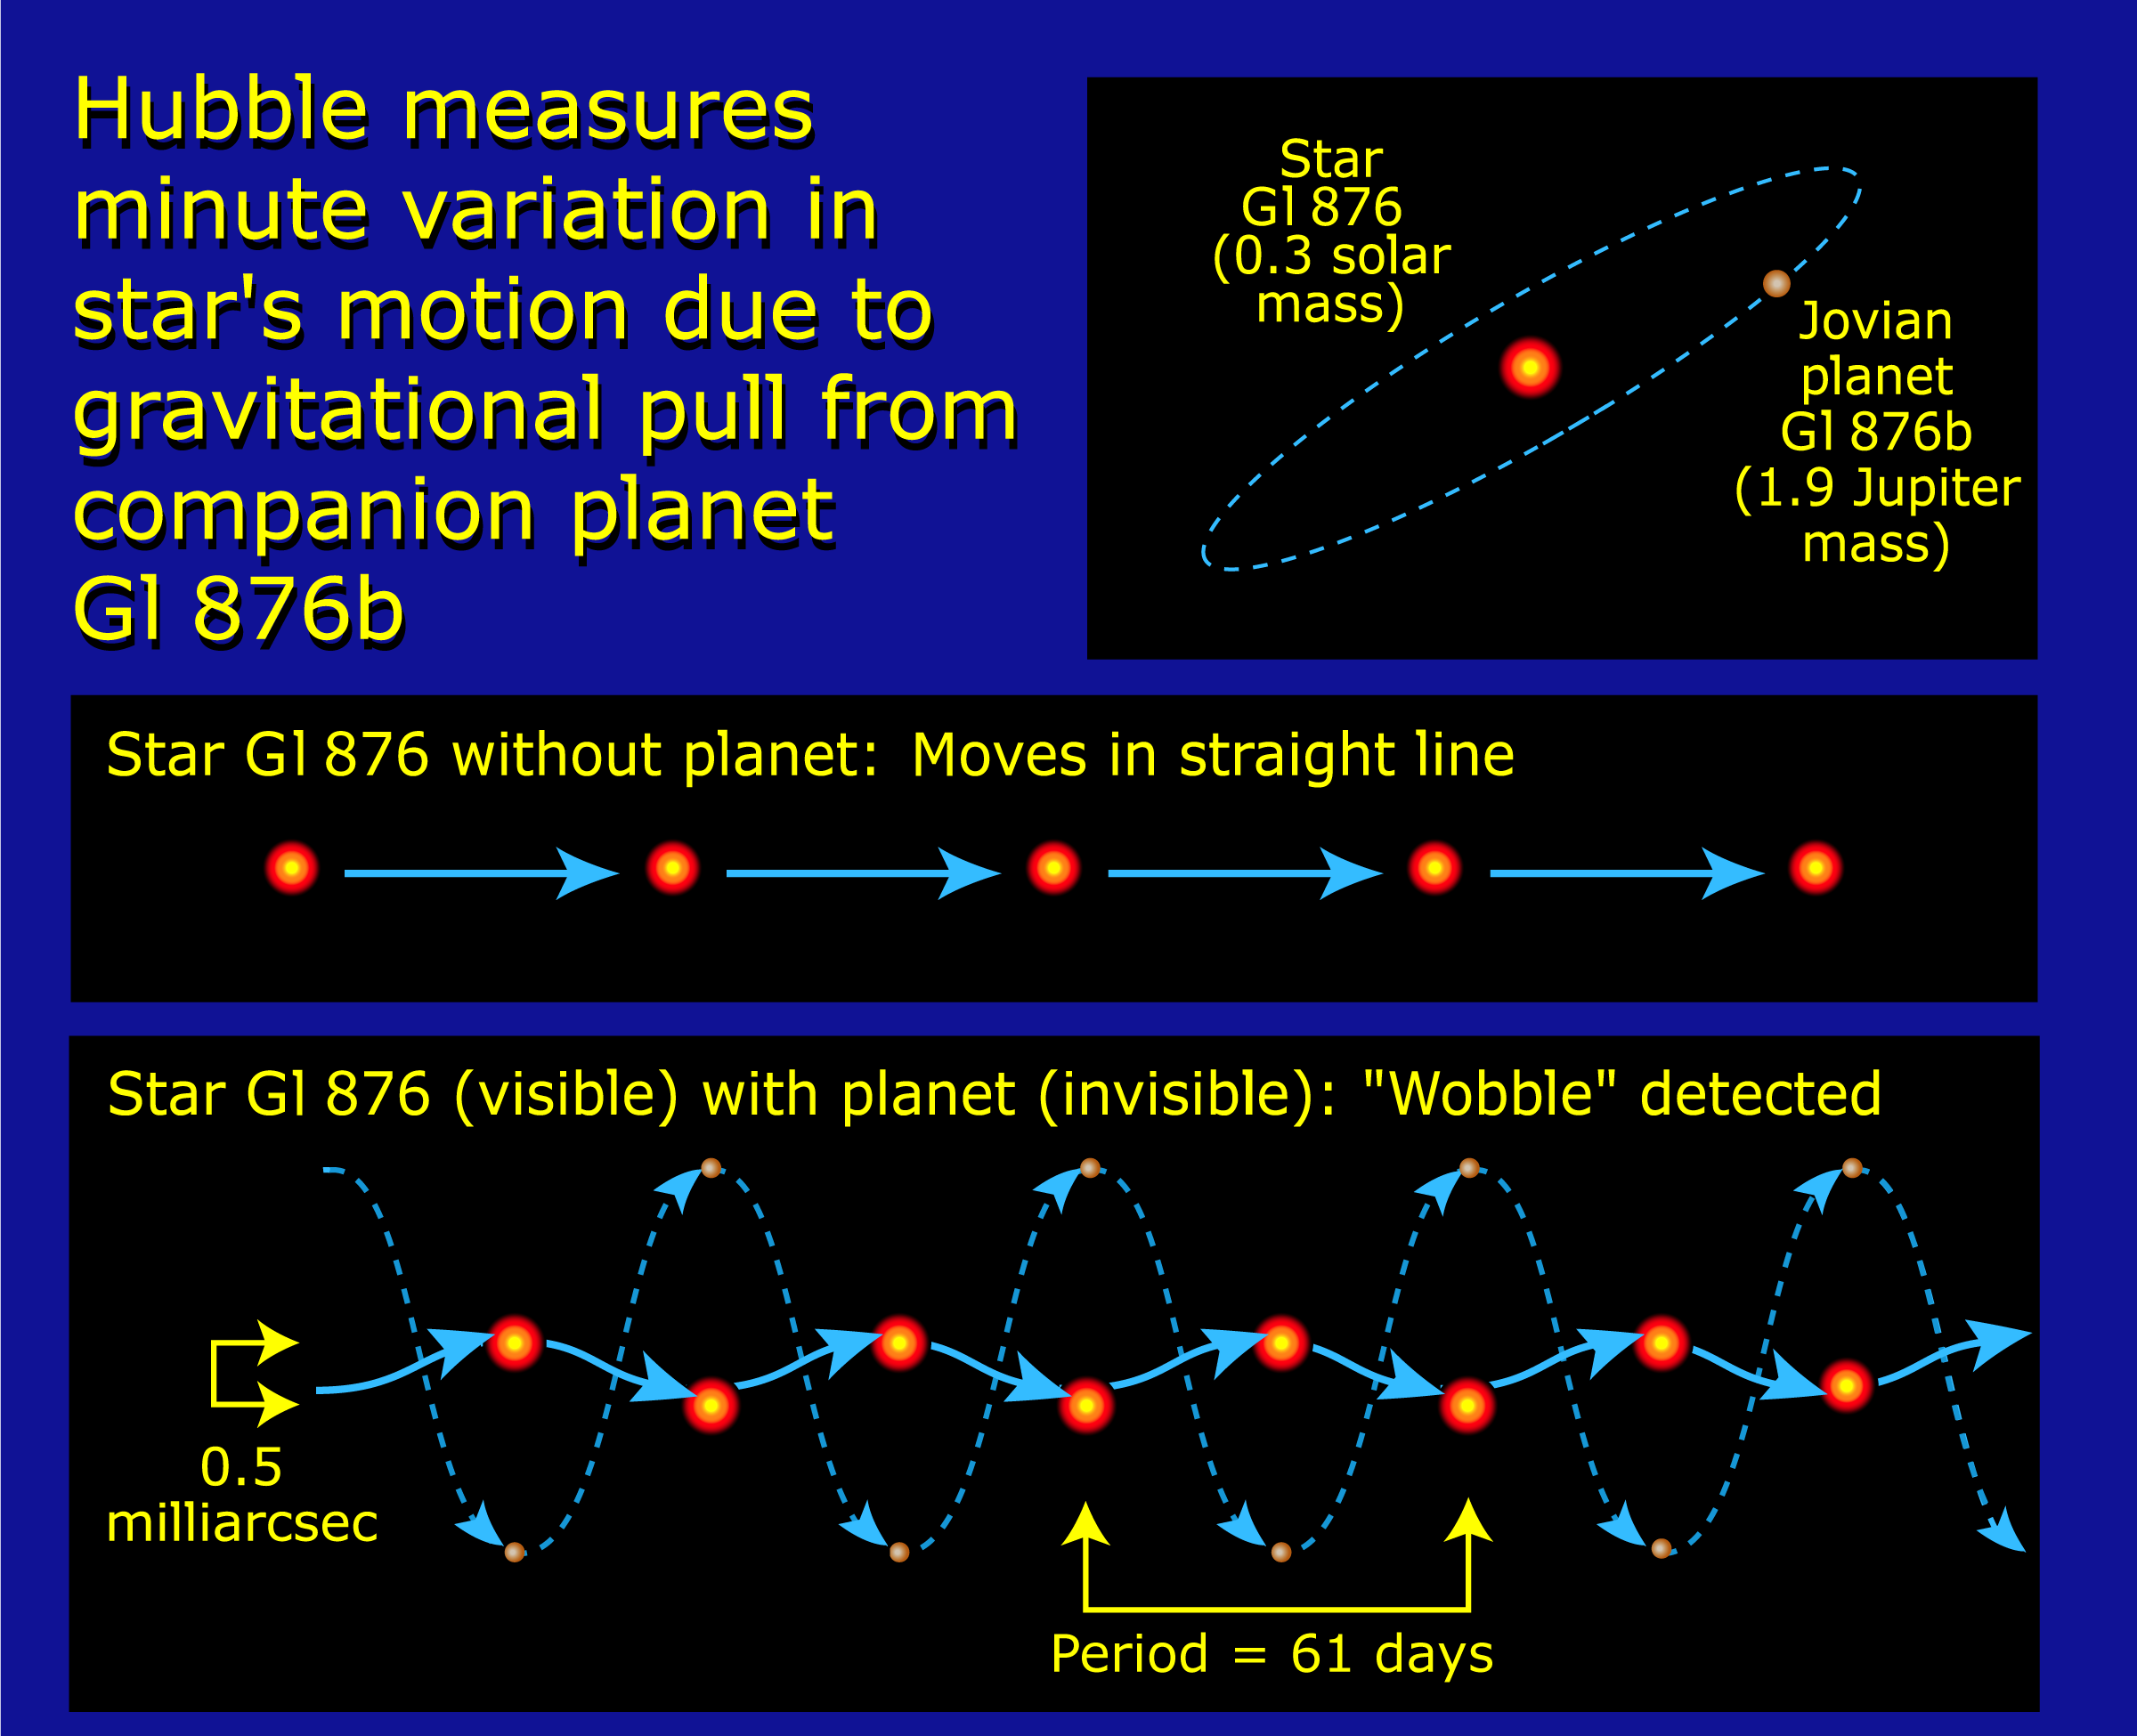

Measuring minute variation of star Gl 876b

An international team of astronomers used the Hubble Space Telescope to help make a precise measurement of the mass of a planet outside our solar system. The Hubble results show that the planet is 1.89 to 2.4 times as massive as Jupiter, our solar system's largest orbiting body. Previous estimates, about which there are some uncertainties, place the planet's mass at a much wider range: between 1.9 and 100 times that of Jupiter's. The planet, called Gliese 876b, orbits the star Gliese 876. It is only the second planet outside our solar system for which astronomers have determined a precise mass.

Credit: NASA/ESA and A. Feild (STScI)